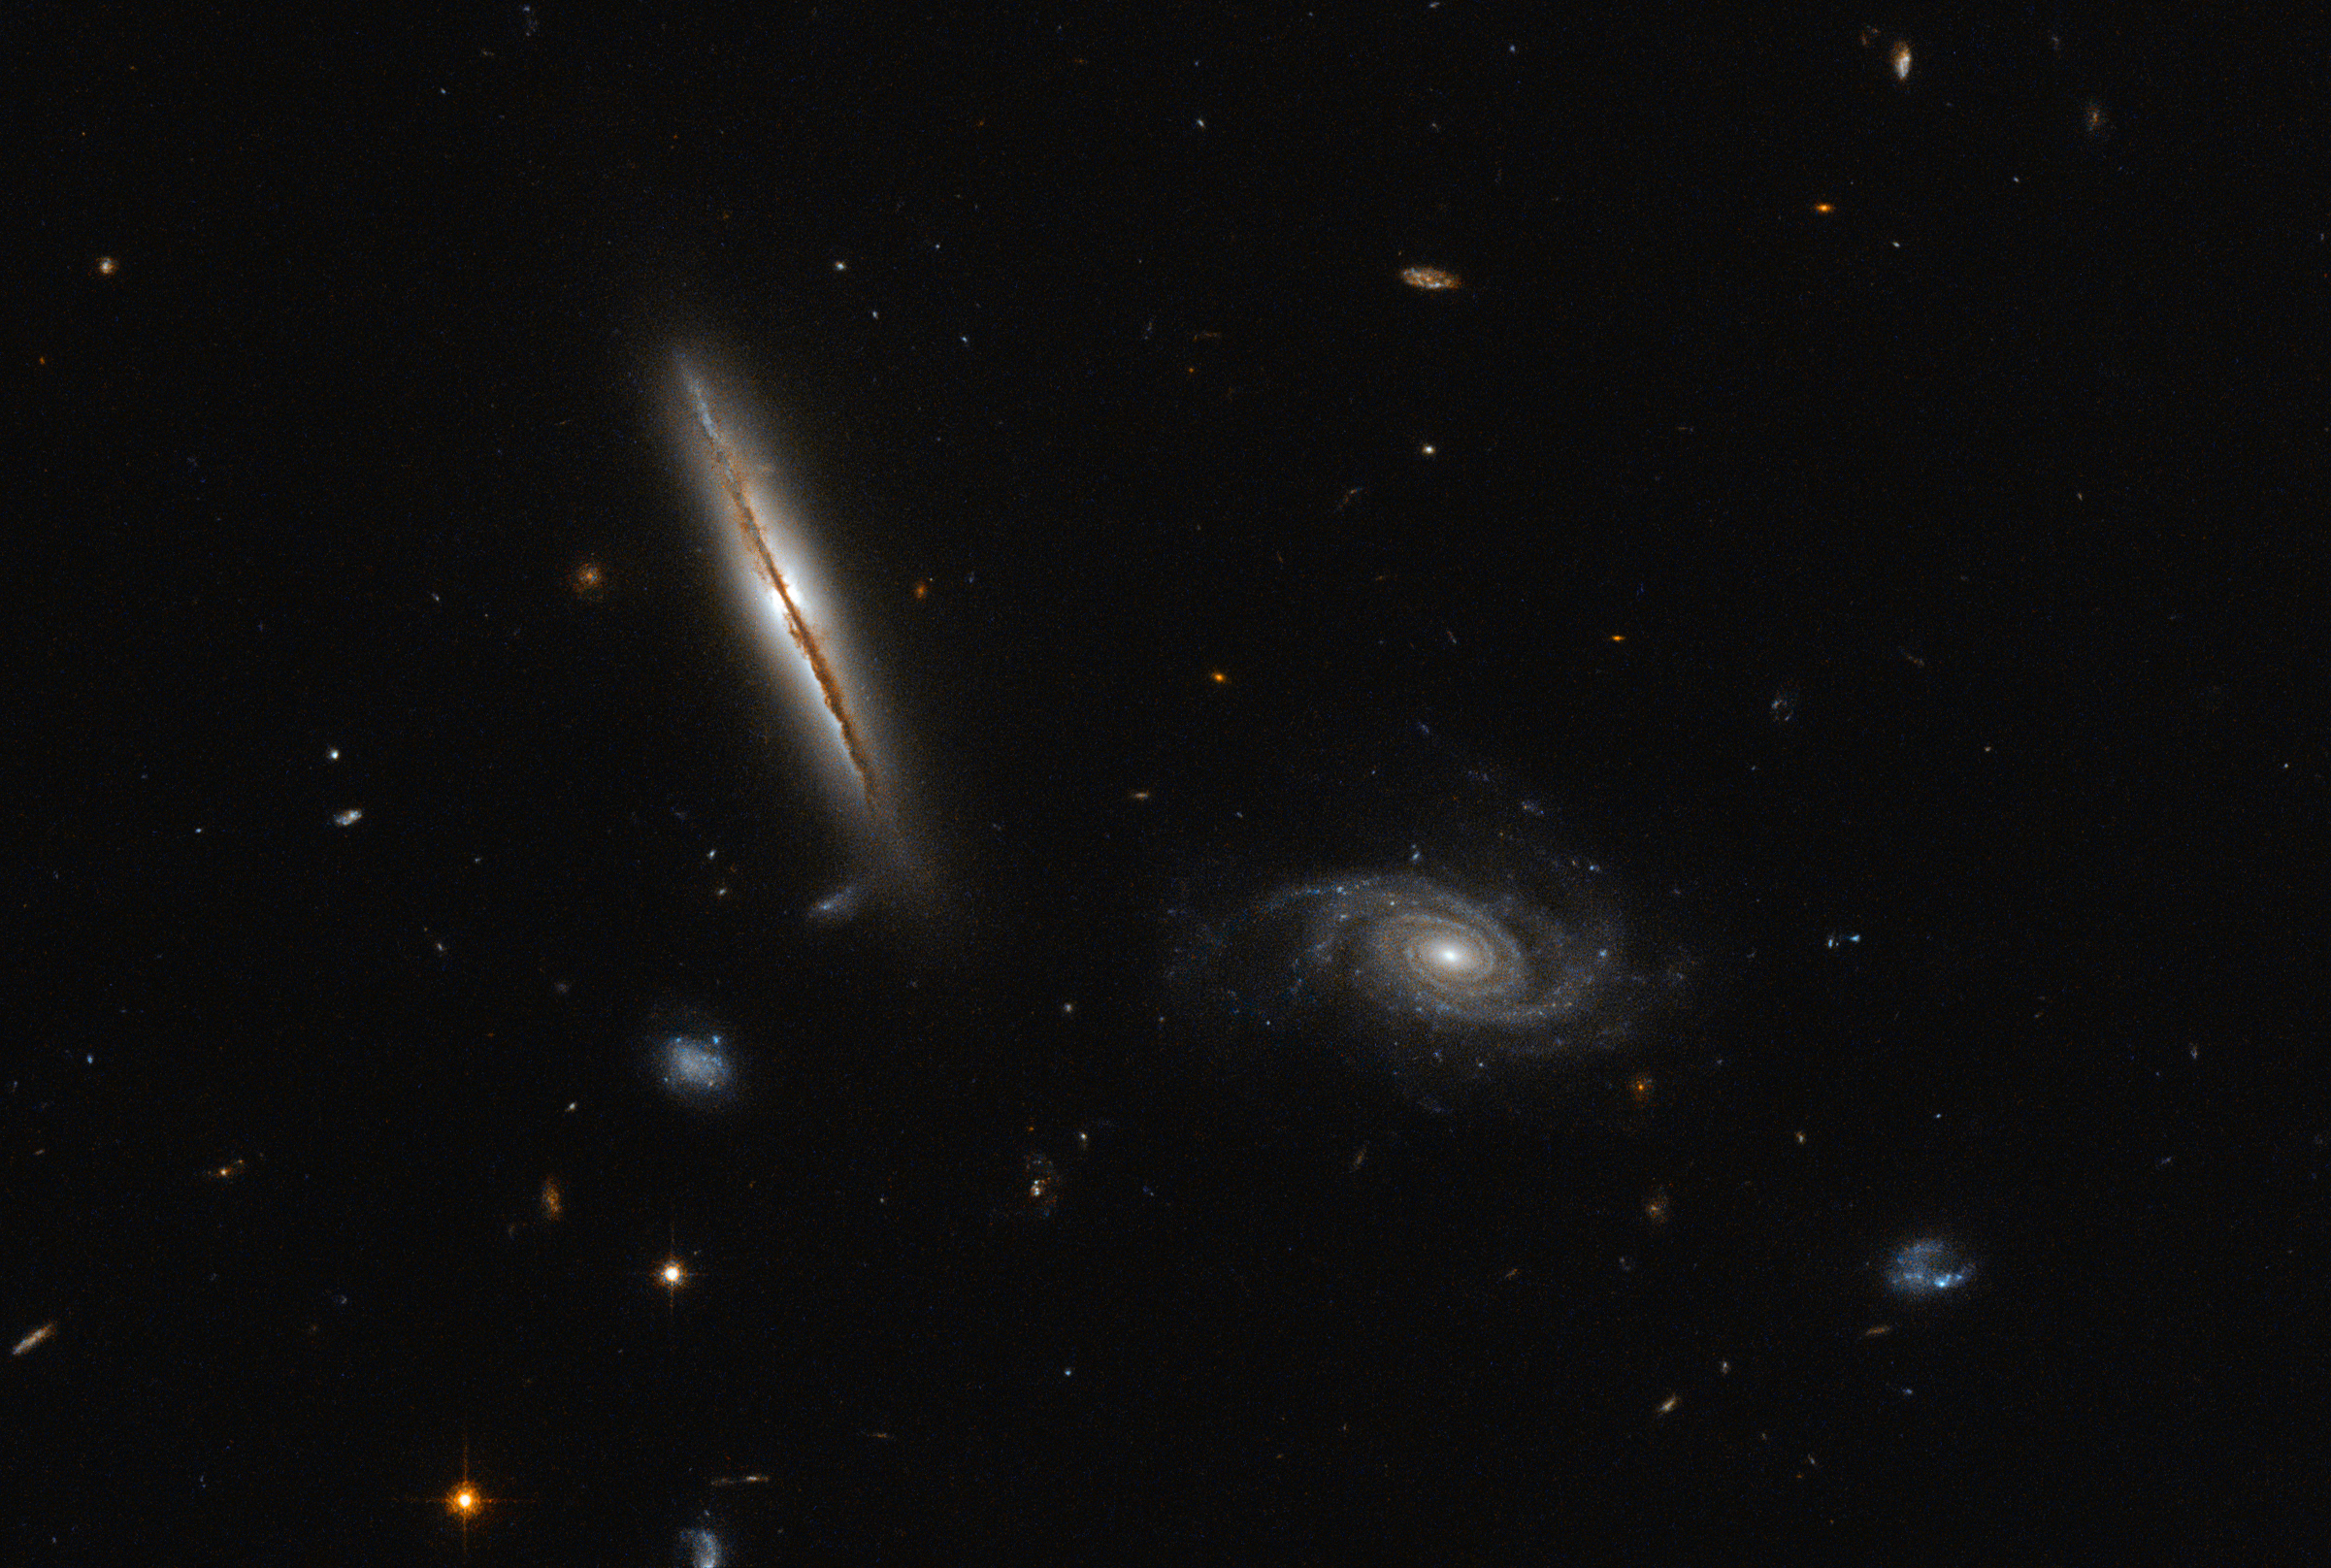

A misbehaving spiral

Despite its unassuming appearance, the edge-on spiral galaxy captured in the left half of this NASA/ESA Hubble Space Telescope image is actually quite remarkable.

Located about one billion light-years away in the constellation of Eridanus, this striking galaxy — known as LO95 0313-192 — has a spiral shape similar to that of the Milky Way. It has a large central bulge, and arms speckled with brightly glowing gas mottled by thick lanes of dark dust. Its companion, sitting pretty in the right of the frame, is known rather unpoetically as [LOY2001] J031549.8-190623.

Jets, outbursts of superheated gas moving at close to the speed of light, have long been associated with the cores of giant elliptical galaxies, and galaxies in the process of merging. However, in an unexpected discovery, astronomers found LO95 0313-192 to have intense radio jets spewing out from its centre! The galaxy appears to have two more regions that are also strongly emitting in the radio part of the spectrum, making it even rarer still.

The discovery of these giant jets in 2003 — not visible in this image, but indicated in this earlier Hubble composite — has been followed by the unearthing of a further three spiral galaxies containing radio-emitting jets in recent years. This growing class of unusual spirals continues to raise significant questions about how jets are produced within galaxies, and how they are thrown out into the cosmos.

Credit: ESA/Hubble & NASA Acknowledgement: Judy Schmidt